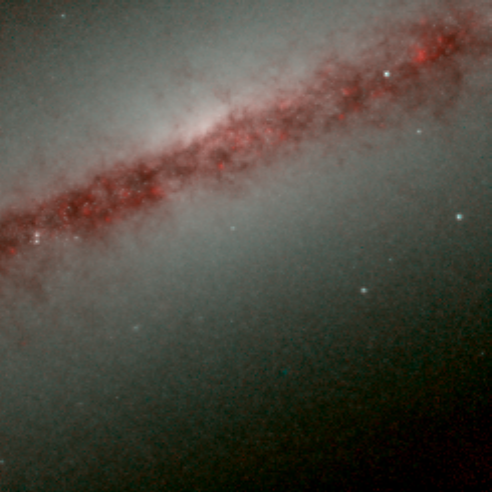

Hubble's Infrared Galaxy Gallery. A View of NGC 891

Astronomers have used the NASA/ESA Hubble Space Telescope to produce an infrared 'photo essay' of spiral galaxies. By penetrating the dust clouds swirling around the centers of these galaxies, the telescope’s infrared vision is offering fresh views of star birth.

Credit: Torsten Boeker, Space Telescope Science Institute, and NASA/ESA